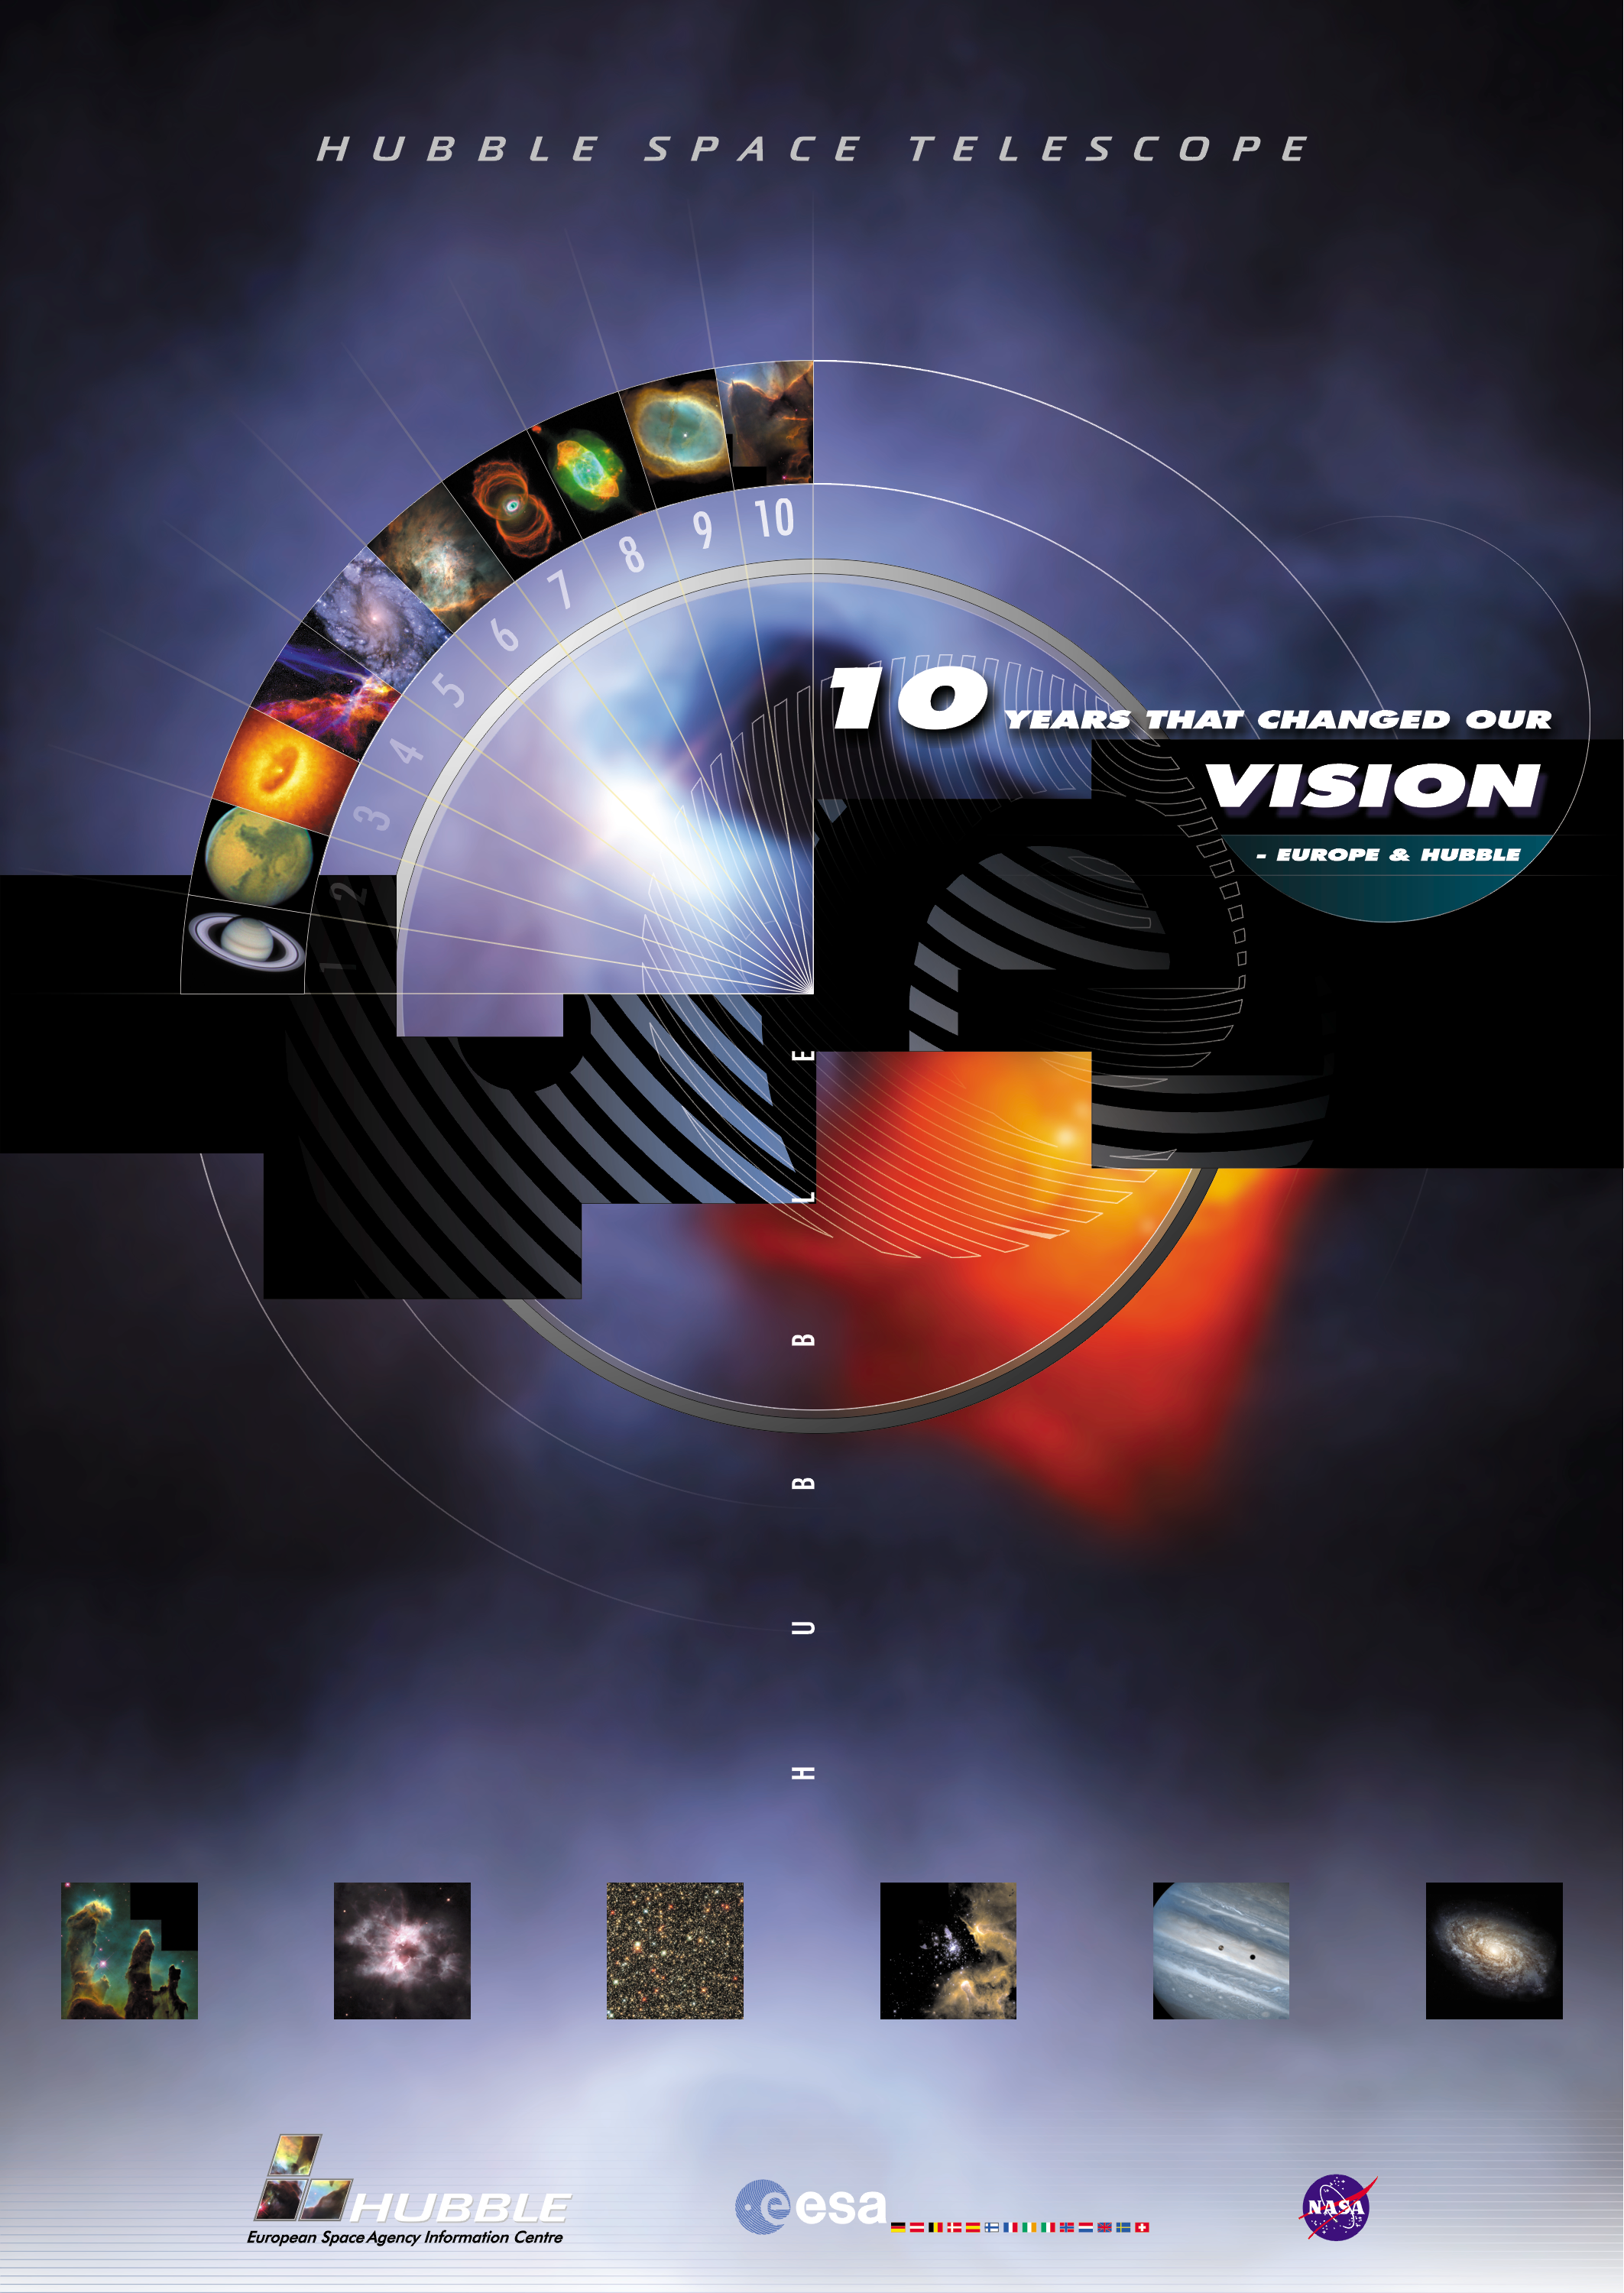

Hubble ESA information centre poster

Hubble ESA Information Centre poster, celebrating 10 years of discovery from Hubble.

Credit: ESA, Martin Kornmesser, Lars Lindberg Christensen